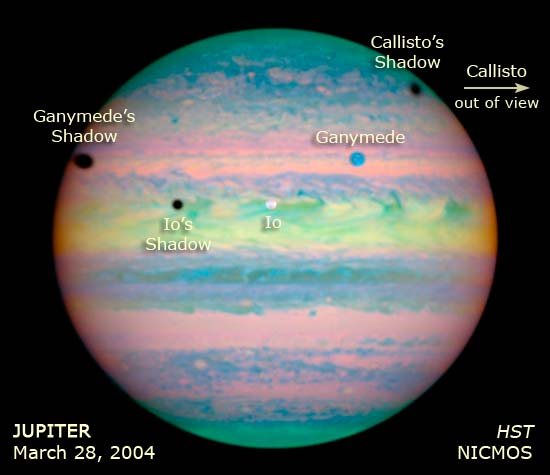

Annotated HST/NICMOS Image

In this image, the moons and shadows that crossed Jupiter's face are labeled. The Hubble Space Telescope captured the rare triple eclipse on March 28, 2004.

Credit: NASA, ESA, E. Karkoschka (University of Arizona) and Z. Levay (STScI)